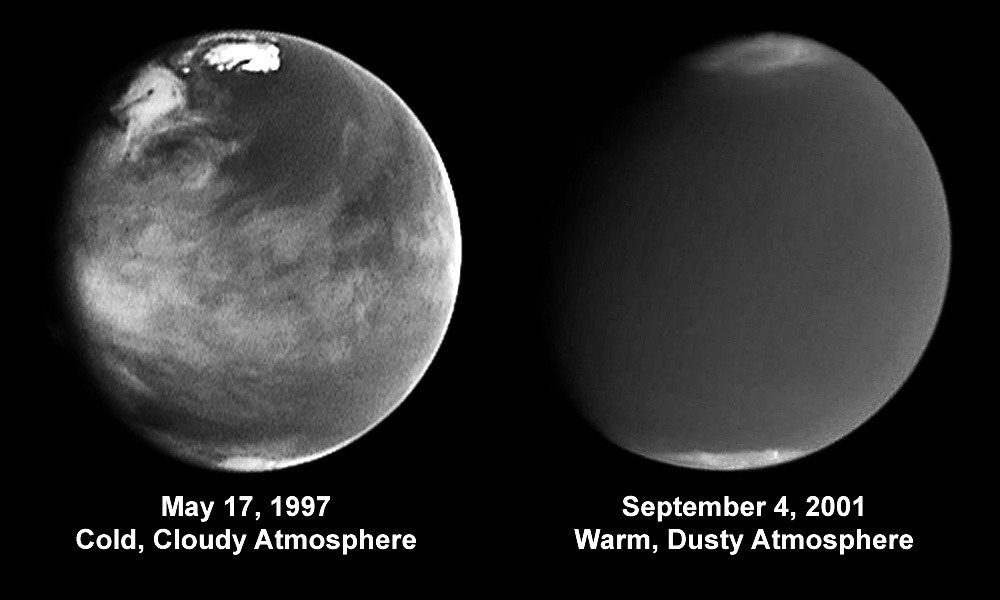

Comparison of atmospheric activity (blue 410 nm) from 1997 and 2001

A pair of eagle-eyed spacecraft - the NASA Mars Global Surveyor (MGS) and NASA/ESA Hubble Space Telescope - are giving amazed astronomers a ringside seat to the biggest global dust storm seen on Mars in several decades. The Martian dust storm, larger by far than any seen on Earth, has raised a cloud of dust that has engulfed the entire planet for several months.

Credit: J. Bell (Cornell University)